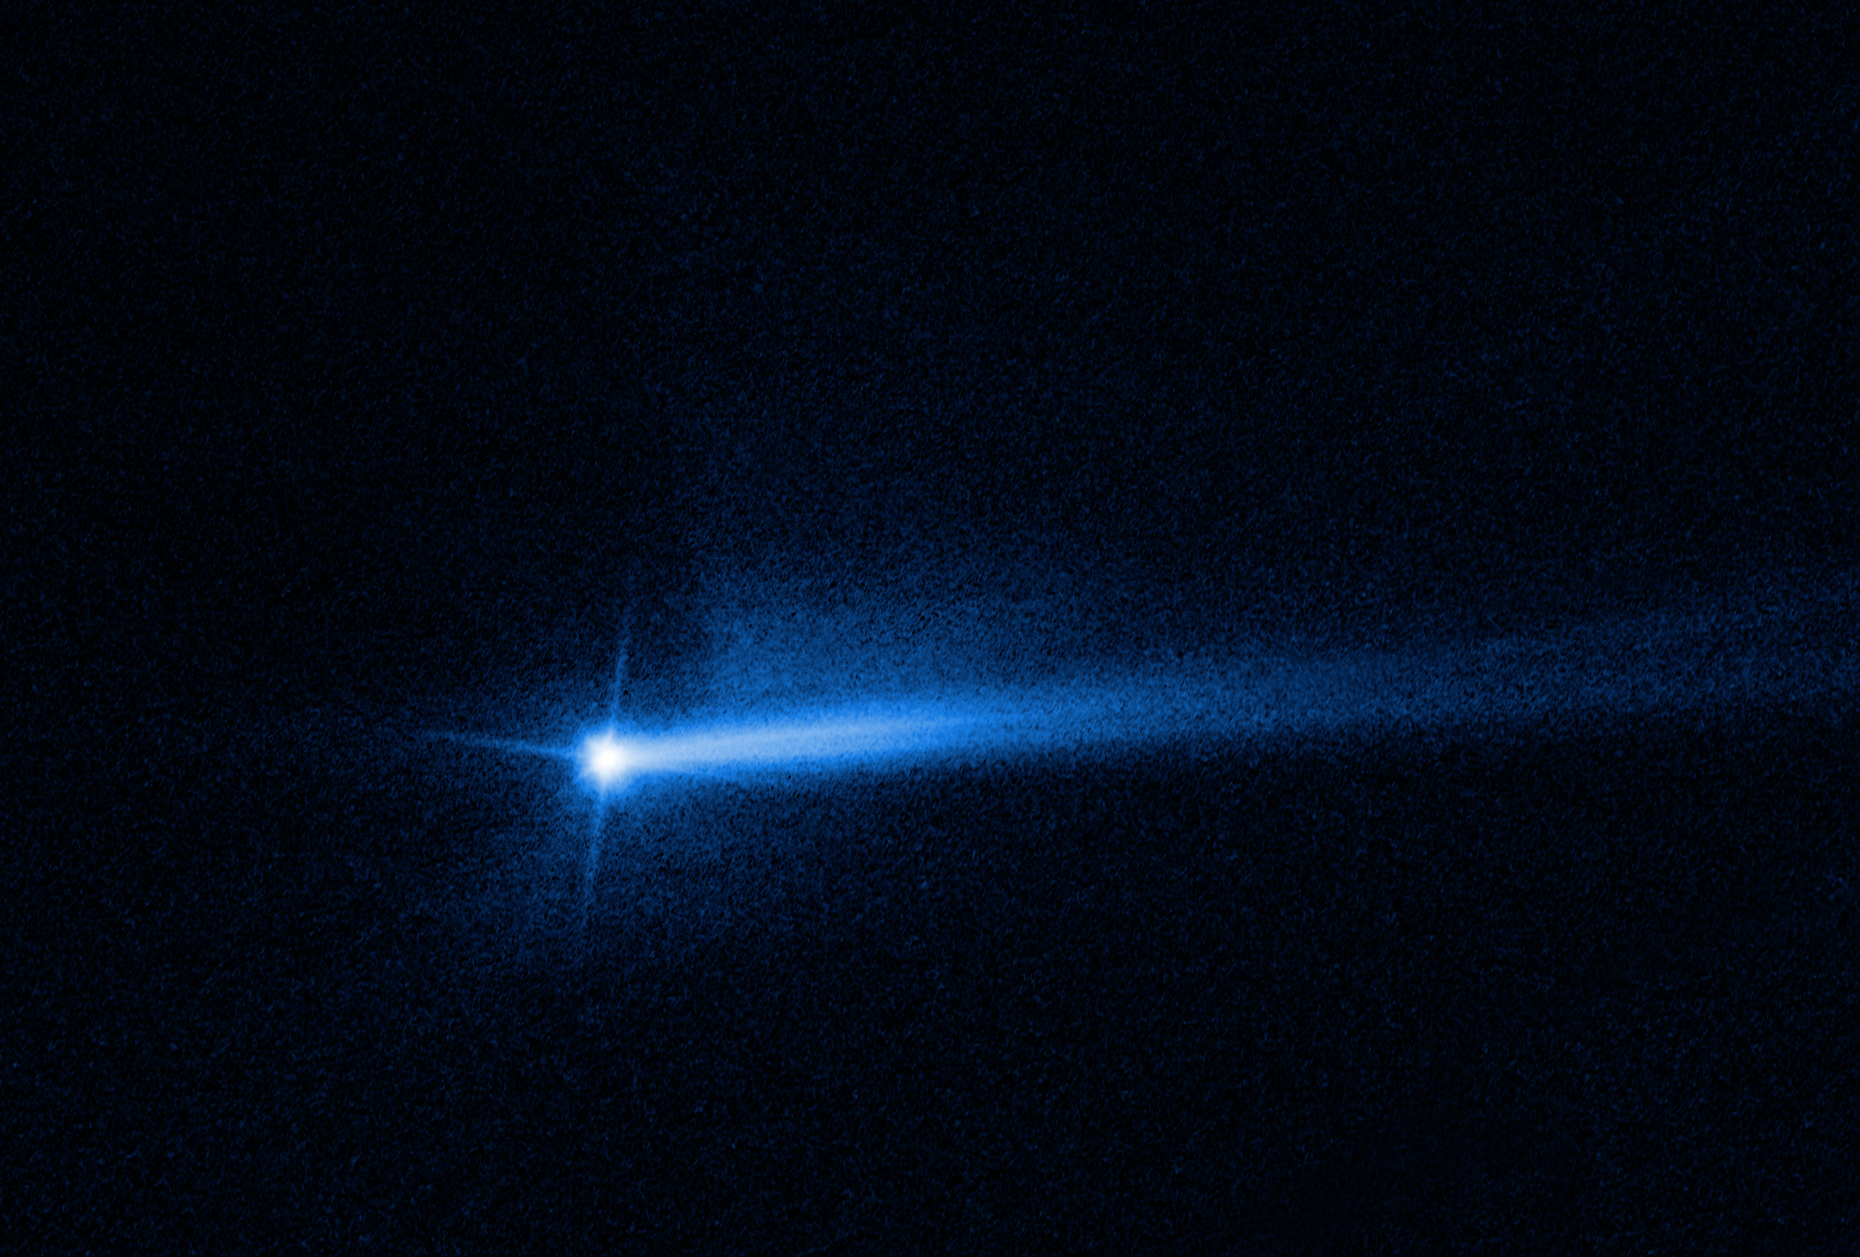

Twin Tail Revealed in New Hubble Image of Didymos-Dimorphos System Following DART Impact

Two tails of dust ejected from the Didymos-Dimorphos asteroid system are seen in new images from the NASA/ESA Hubble Space Telescope, documenting the lingering aftermath of the NASA’s Double Asteroid Redirection Test (DART) impact on 27 September 2022 at 01:14 CEST. Current data show that DART shortened Dimorphos’ original 11 hour and 55 minute orbit around Didymos by about 32 minutes.

Repeated observations from Hubble over the last several weeks have allowed scientists to present a more complete picture of how the system’s debris cloud has evolved over time. The observations show that the ejected material, or “ejecta,” has expanded and faded in brightness as time went on after impact, largely as expected. The twin tail is an unexpected development, although similar behavior is commonly seen in comets and active asteroids. The Hubble observations provide the best-quality image of the double-tail to date.

Following impact, Hubble made 18 observations of the system. Imagery indicates the second tail formed between 2-8 October 2022.

In this image, DART impacted the Didymos-Dimorphos system from the 10 o’clock direction.

The relationship between the comet-like tail and other ejecta features seen at various times in images from Hubble and other telescopes is still unclear, and is something the Investigation Team is currently working to understand. The northern tail is newly developed. In the coming months, scientists will be taking a closer look at the data from Hubble to determine how the second tail developed. There are a number of possible scenarios the team will investigate.

Credit: NASA, ESA, Jian-Yang Li (PSI), Joe Depasquale (STScI)